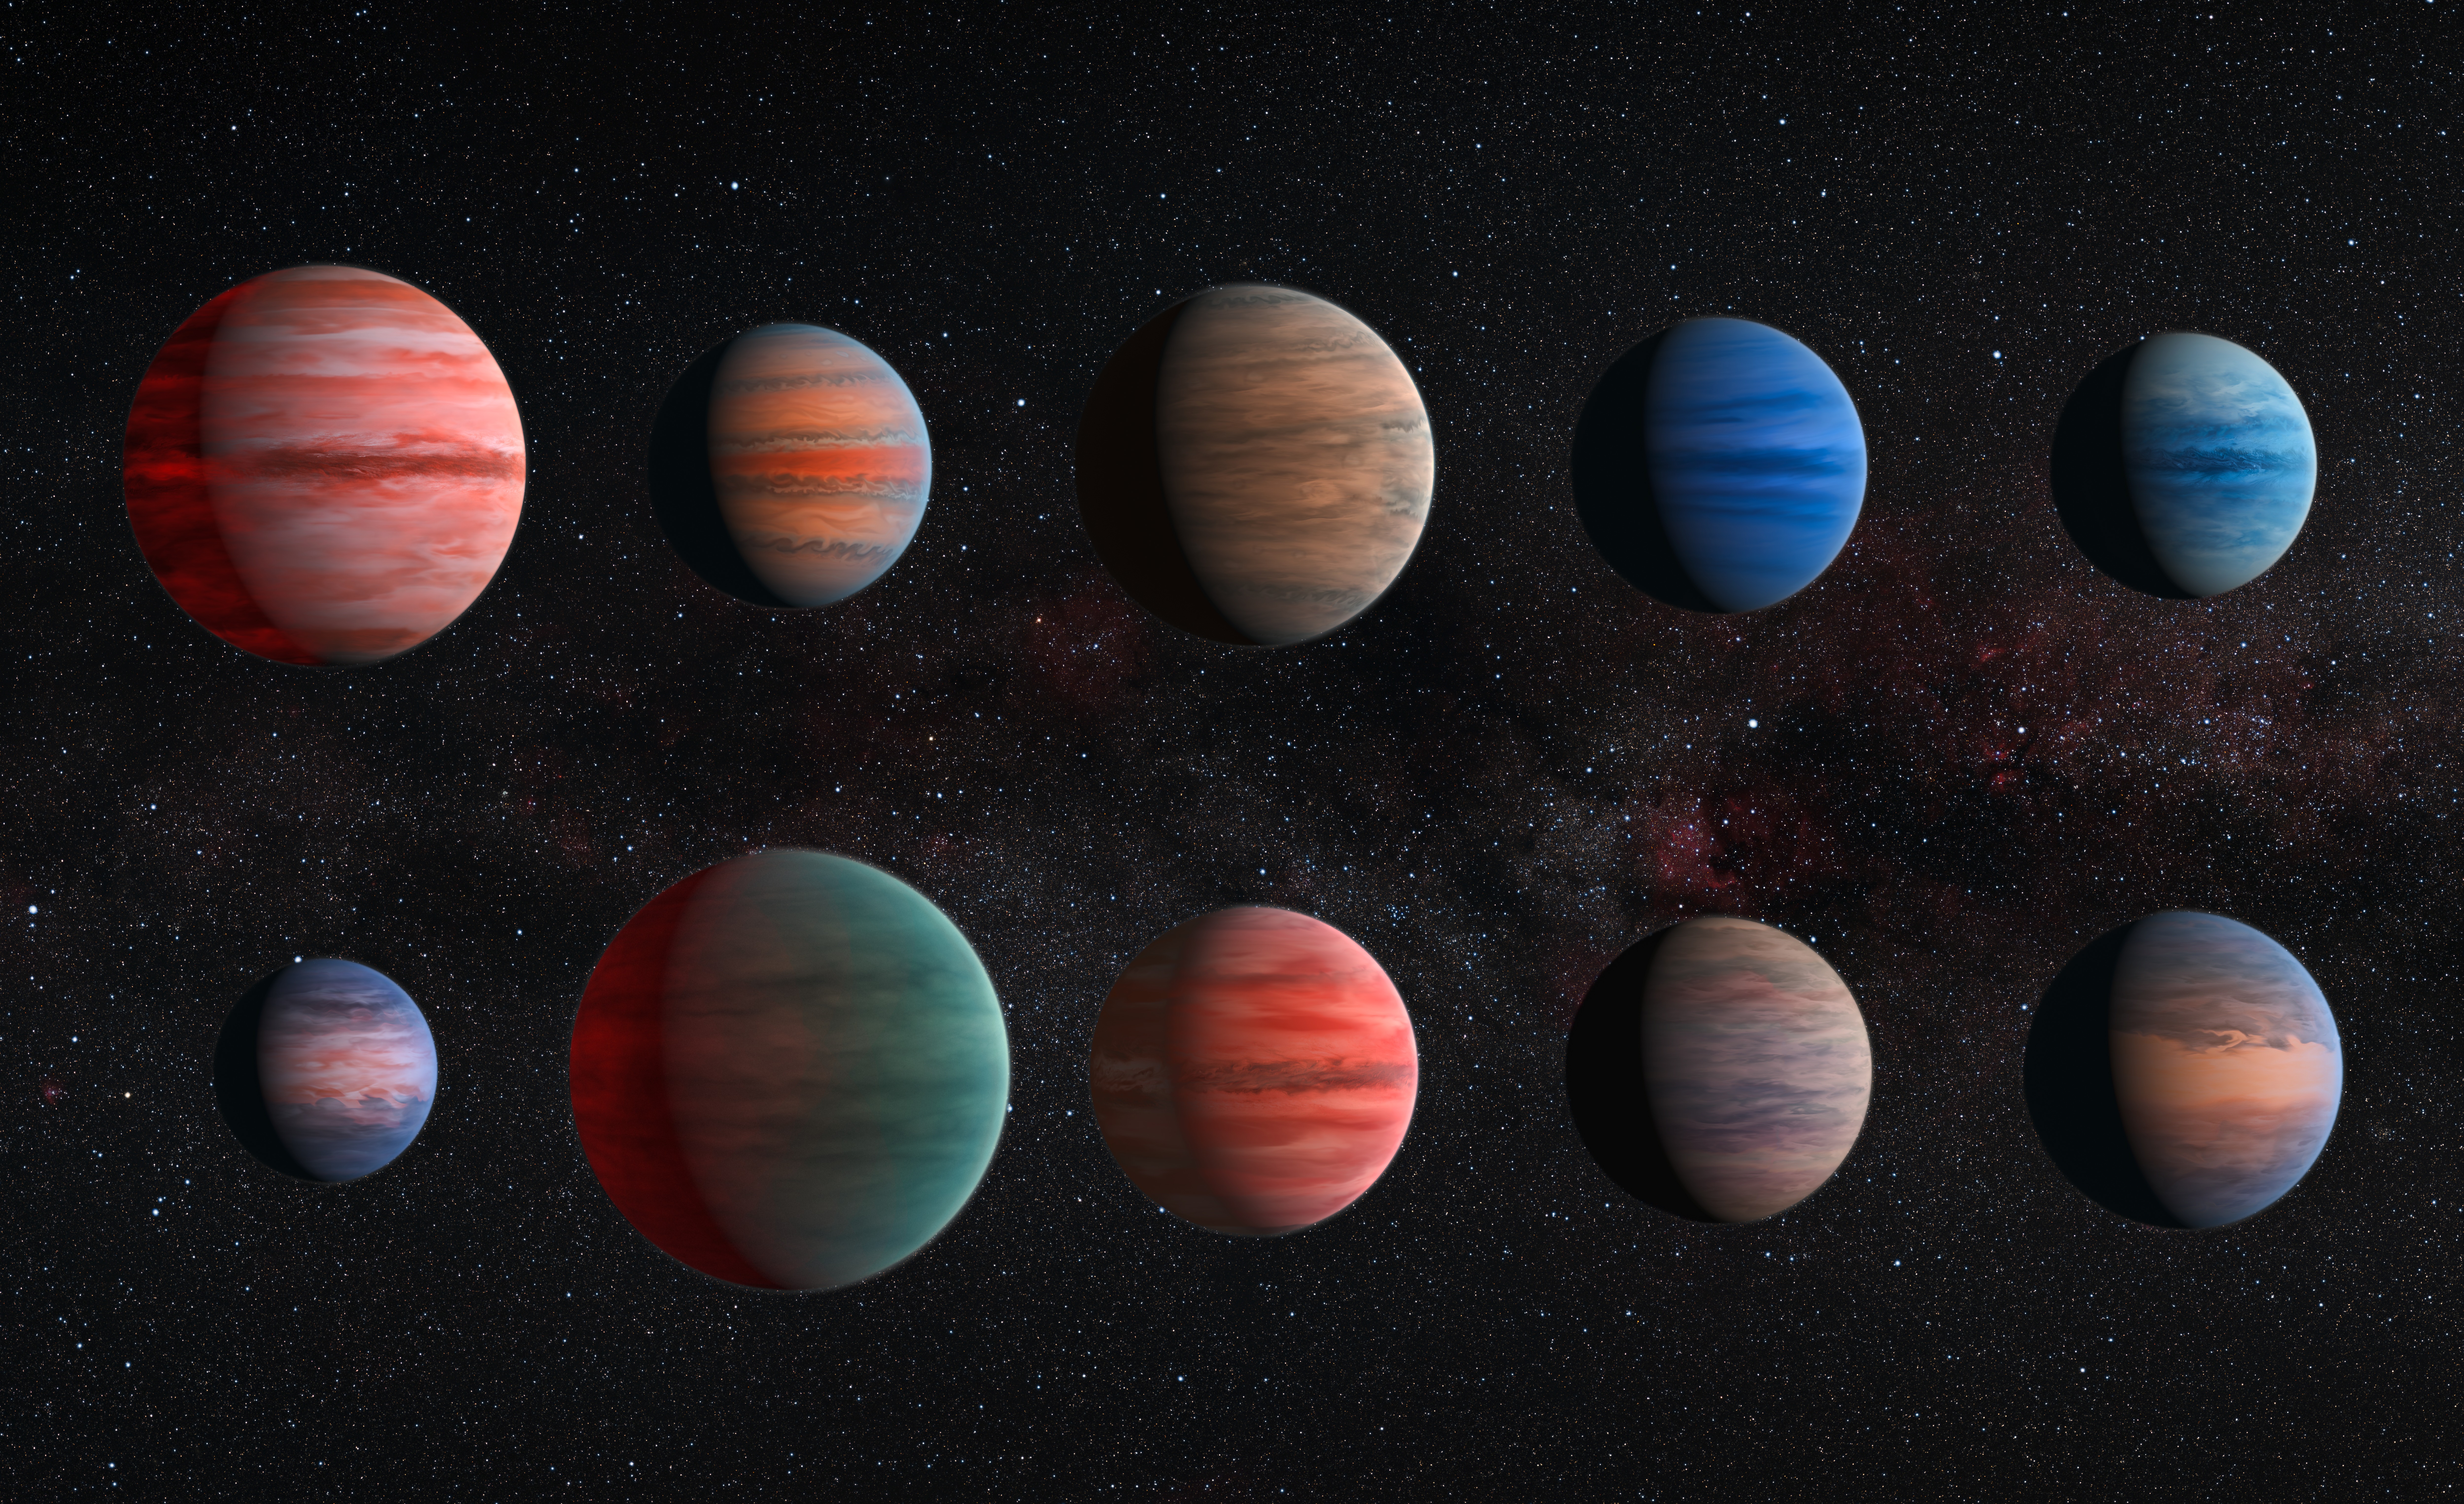

Clear to cloudy hot Jupiters

This image shows an artist’s impression of the ten hot Jupiter exoplanets studied by David Sing and his colleagues. From top left to lower left these planets are WASP-12b, WASP-6b, WASP-31b, WASP-39b, HD 189733b, HAT-P-12b, WASP-17b, WASP-19b, HAT-P-1b and HD 209458b.

The images are to scale with each other. HAT-P-12b, the smallest of them, is approximately the size of Jupiter, while WASP-17b, the largest planet in the sample, is almost twice the size. The planets are also depicted with a variety of different cloud properties.

There is almost no information about the colours of the planets available, with the exception of HD 189733b, which became known as the blue planet (heic1312).

The hottest planets within the sample are portrayed with a glowing night side. This effect is strongest on WASP-12b, the hottest exoplanet in the sample, but also visible on WASP-19b and WASP-17b. It is also known that several of the planets exhibit strong Rayleigh scattering. This effect causes the blue hue of the daytime sky and the reddening of the Sun at sunset on Earth. It is also visible as a blue edge on the planets WASP-6b, HD 189733b, HAT-P-12b, and HD 209458b.

The wind patterns shown on these ten planets, which resemble the visible structures on Jupiter, are based on theoretical models.

Credit: ESA/Hubble & NASA